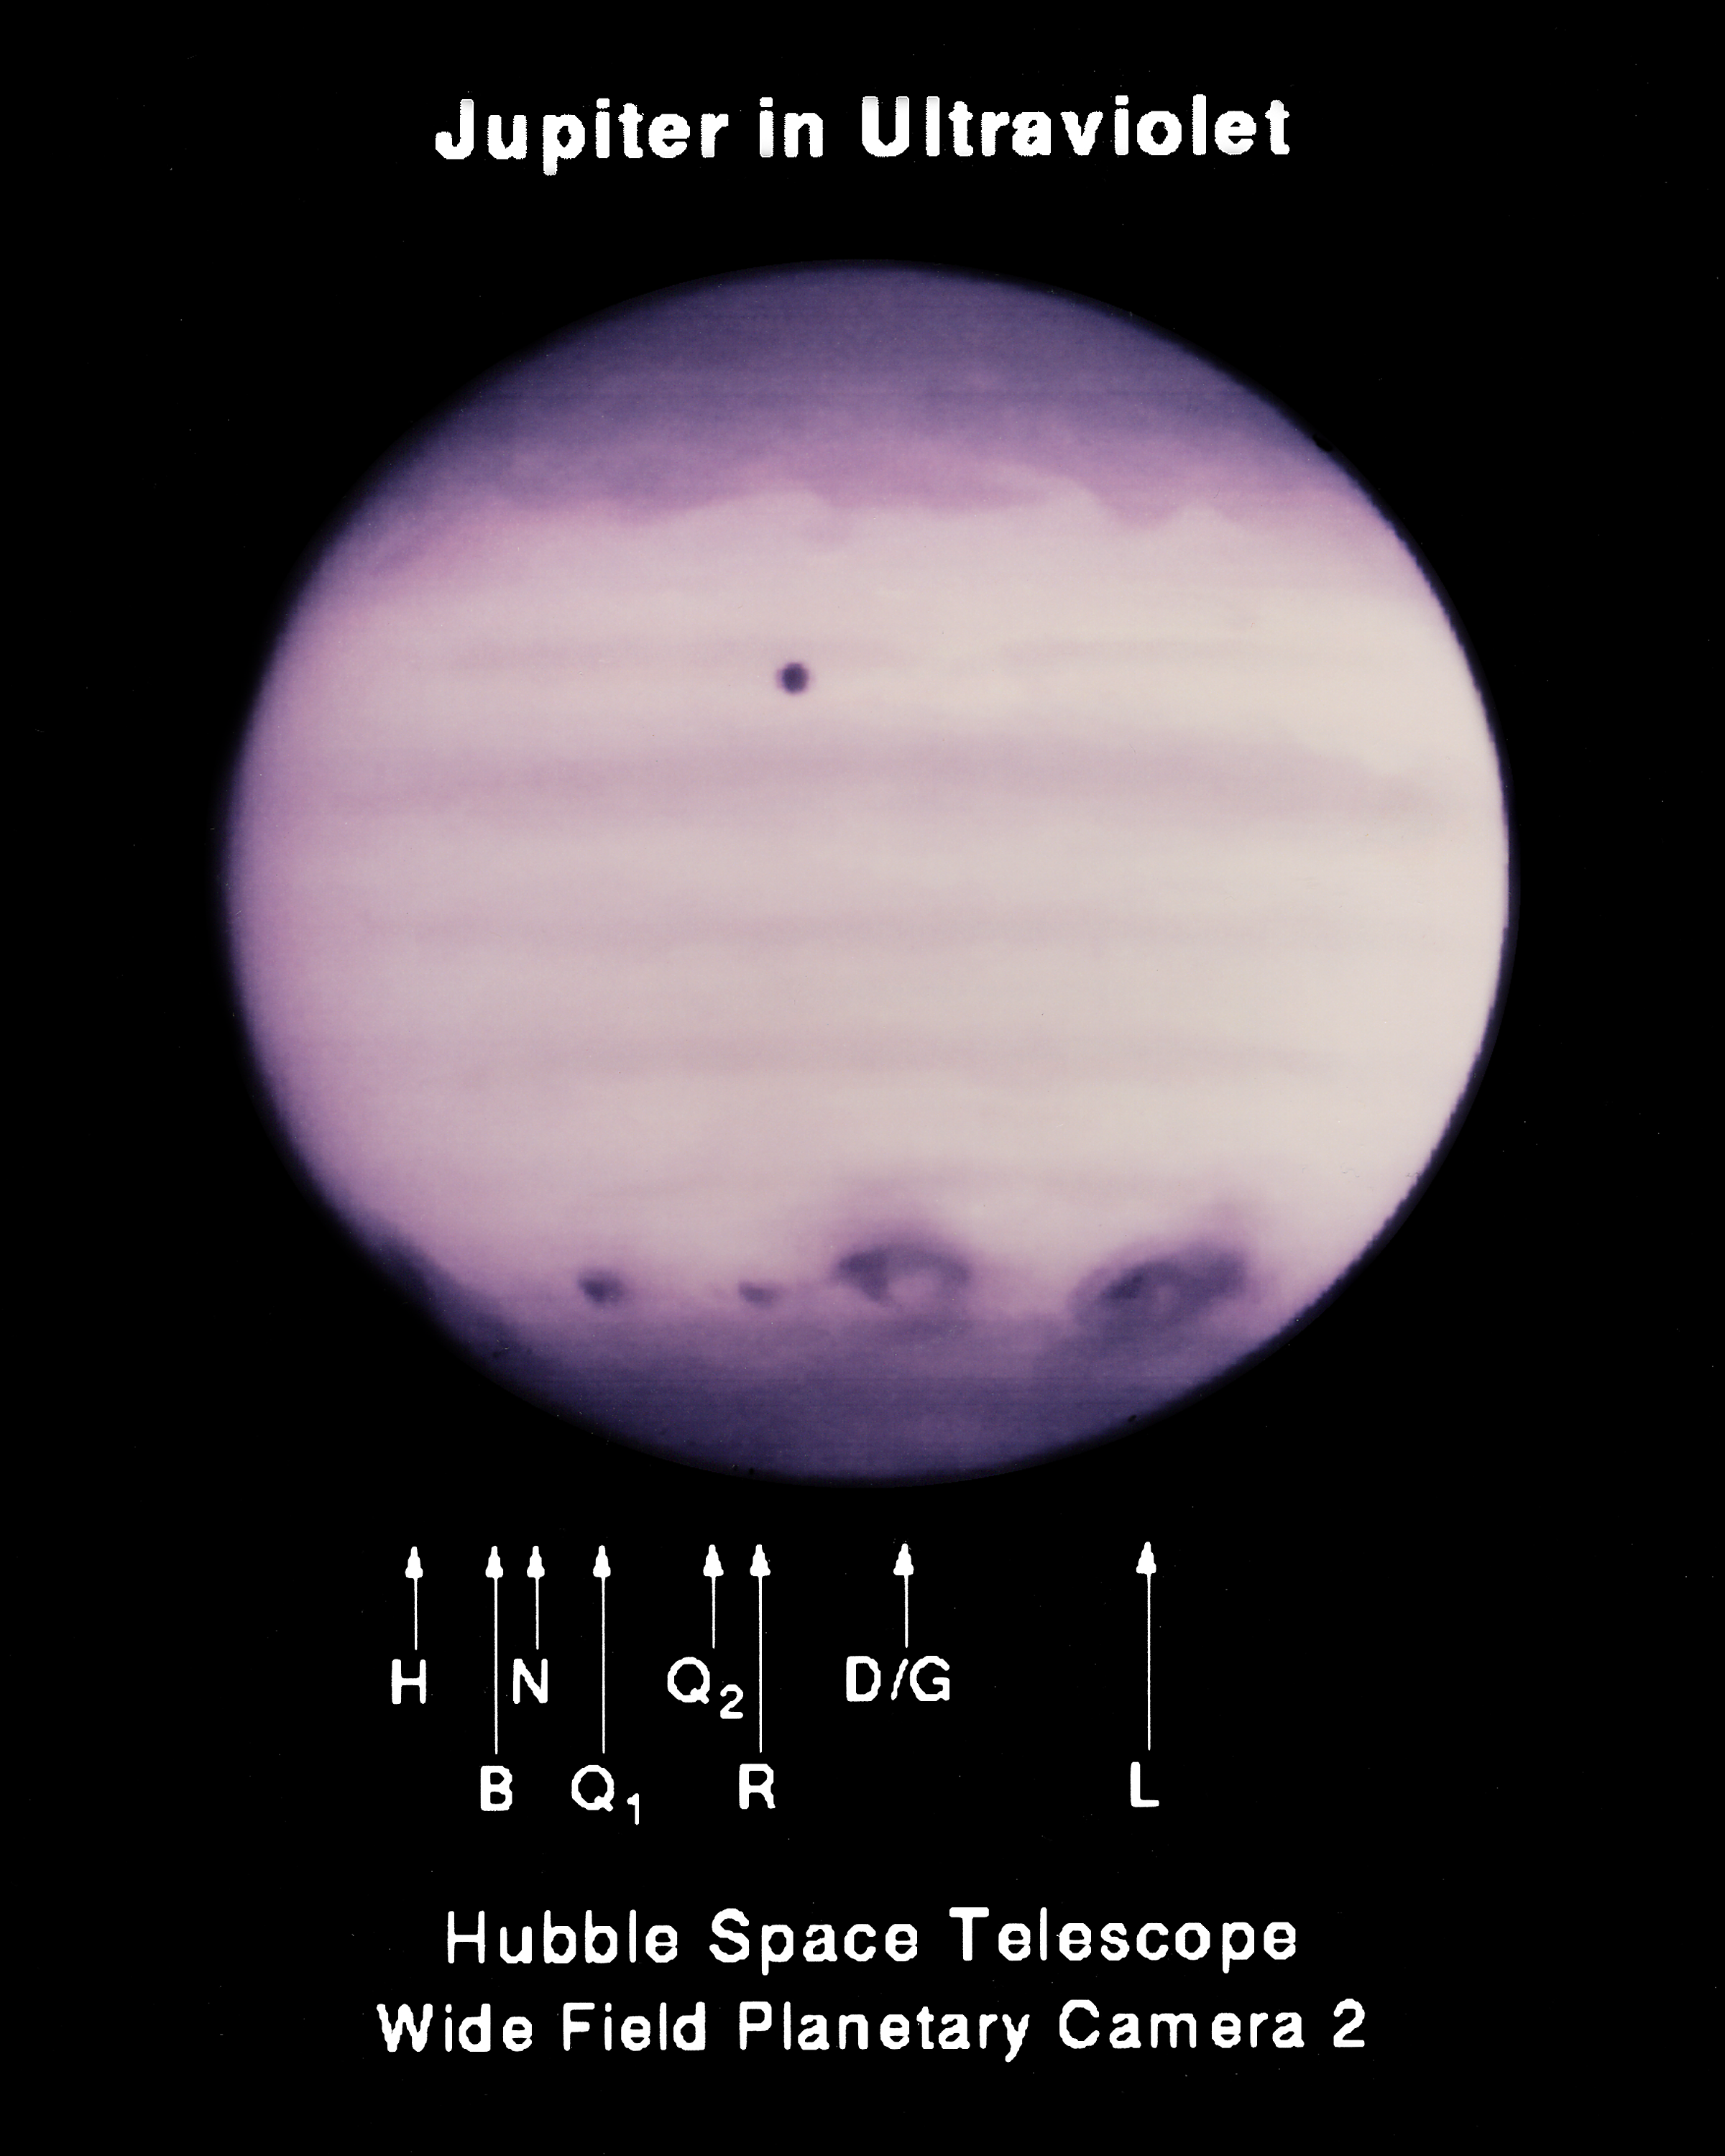

UV Image of Multiple Impact Zones

Ultraviolet image of Jupiter taken by the Wide Field Camera of the Hubble Space Telescope. The image shows Jupiter's atmosphere at a wavelength of 2550 Angstroms after many impacts by fragments of comet Shoemaker-Levy 9.

Credit: Hubble Space Telescope Comet Team and NASA/ESA